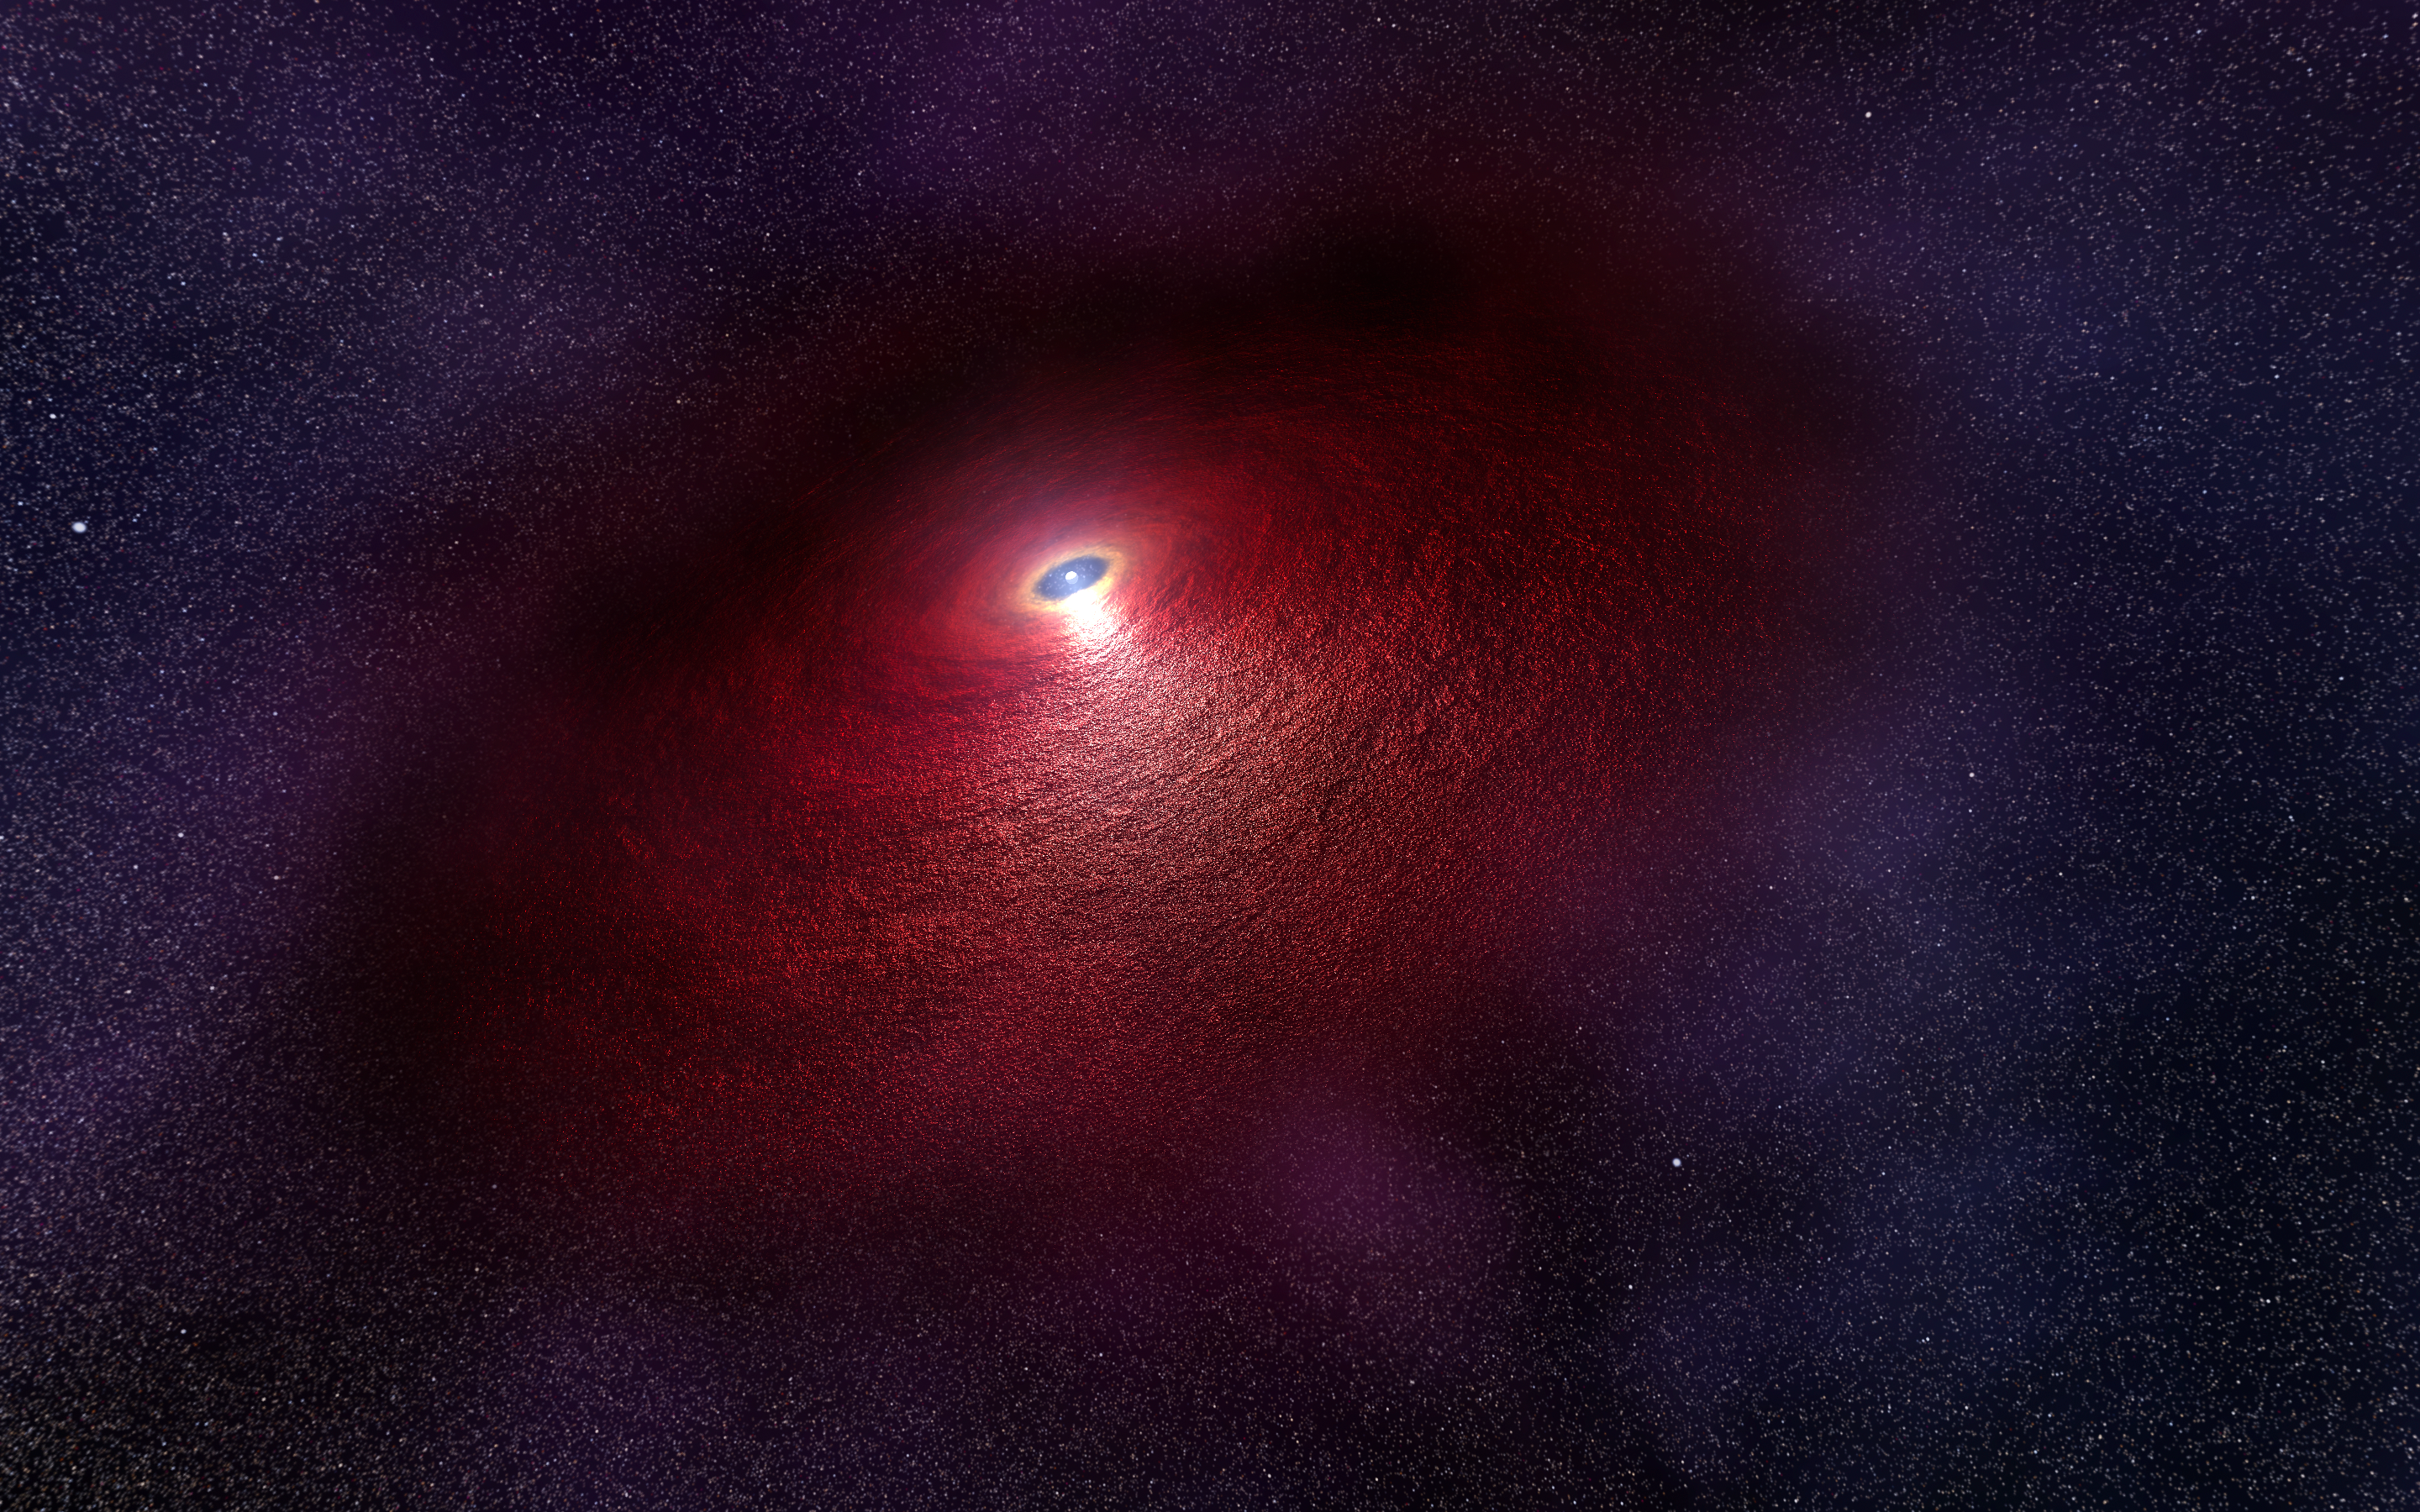

Artist's impression of disc around a neutron star

This illustration shows a neutron star (RX J0806.4-4123) with a disc of warm dust that produces an infrared signature as detected by the NASA/ESA Hubble Space Telescope. The disc was not directly images, but one way to explain the data is by hypothesising a disc structure that could be 29 billion kilometres across. The disc would be made up of material falling back onto the neutron star after the supernova explosion that created the stellar remnant.

Credit: NASA, ESA, and N. Tr’Ehnl (Pennsylvania State University)